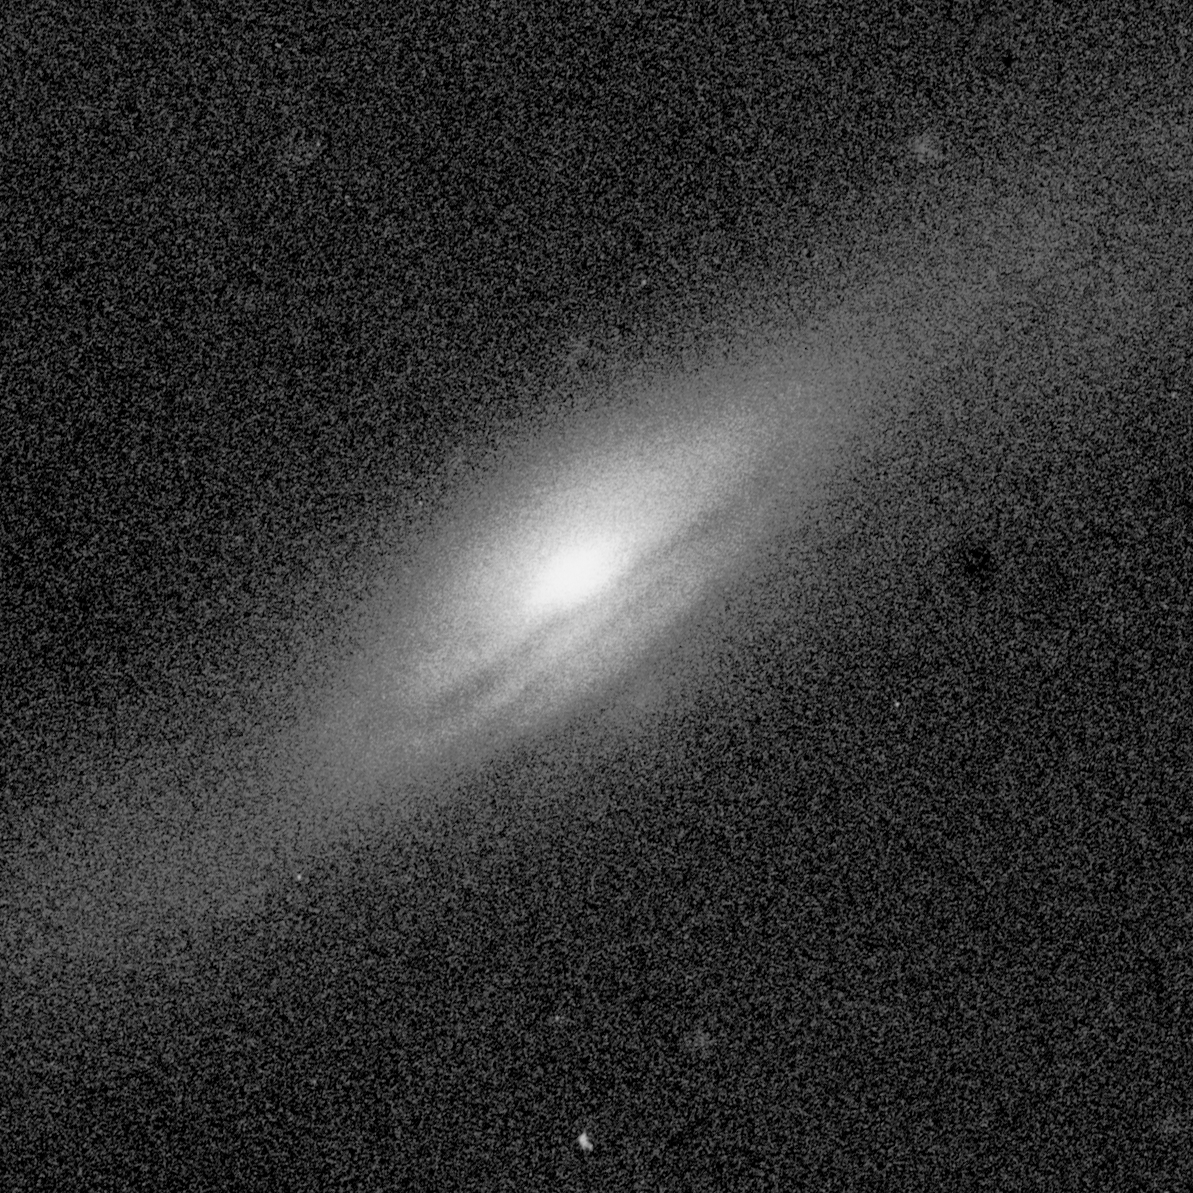

Central bulges of piral galaxies - NGC 5689 (ground-based view)

This ground based images represents a full view of the spiral galaxy NGC 5689.

Credit: Allan Sandage (The Observatories of the Carnegie Institution of Washington) and John Bedke (Computer Sciences Corporation and the Space Telescope Science Institute)